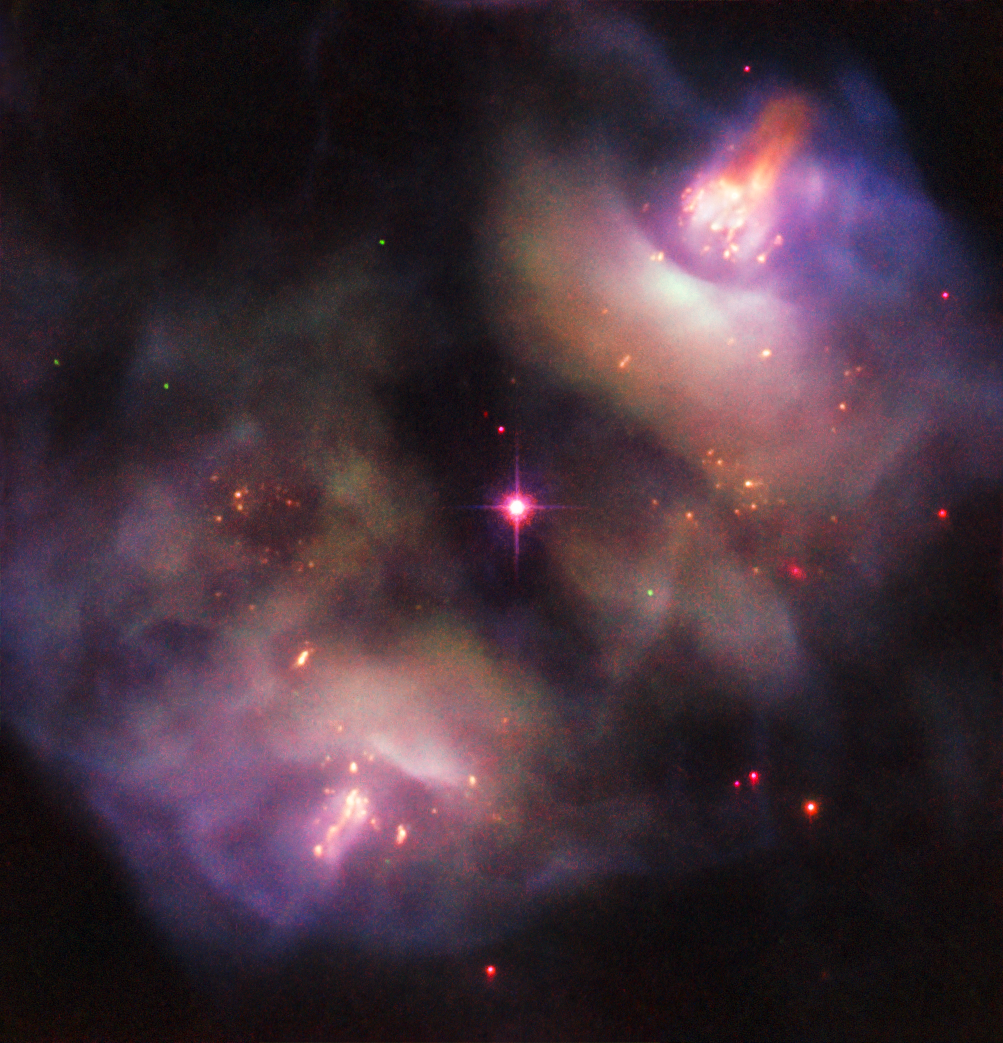

The Death of a Star

This atmospheric Picture of the Week, taken with the NASA/ESA Hubble Space Telescope, shows a dark, gloomy scene in the constellation of Gemini (The Twins). The subject of this image confused astronomers when it was first studied — rather than being classified as a single object, it was instead recorded as two objects, owing to its symmetrical lobed structure (known as NGC 2371 and NGC 2372, though sometimes referred to together as NGC 2371/2).

These two lobes are visible to the upper right and lower left of the frame, and together form something known as a planetary nebula. Despite the name, such nebulae have nothing to do with planets; NGC 2371/2 formed when a Sun-like star reached the end of its life and blasted off its outer layers, shedding the constituent material and pushing it out into space to leave just a superheated stellar remnant behind. This remnant is visible as the orange-tinted star at the centre of the frame, sitting neatly between the two lobes.

The structure of this region is complex. It is filled with dense knots of gas, fast-moving jets that appear to be changing direction over time, and expanding clouds of material streaming outwards on diametrically opposite sides of the remnant star. Patches of this scene glow brightly as the remnant star emits energetic radiation that excites the gas within these regions, causing it to light up. This scene will continue to change over the next few thousand years; eventually the knotty lobes will dissipate completely, and the remnant star will cool and dim to form a white dwarf.

Credit: ESA/Hubble & NASA, R. Wade et al.